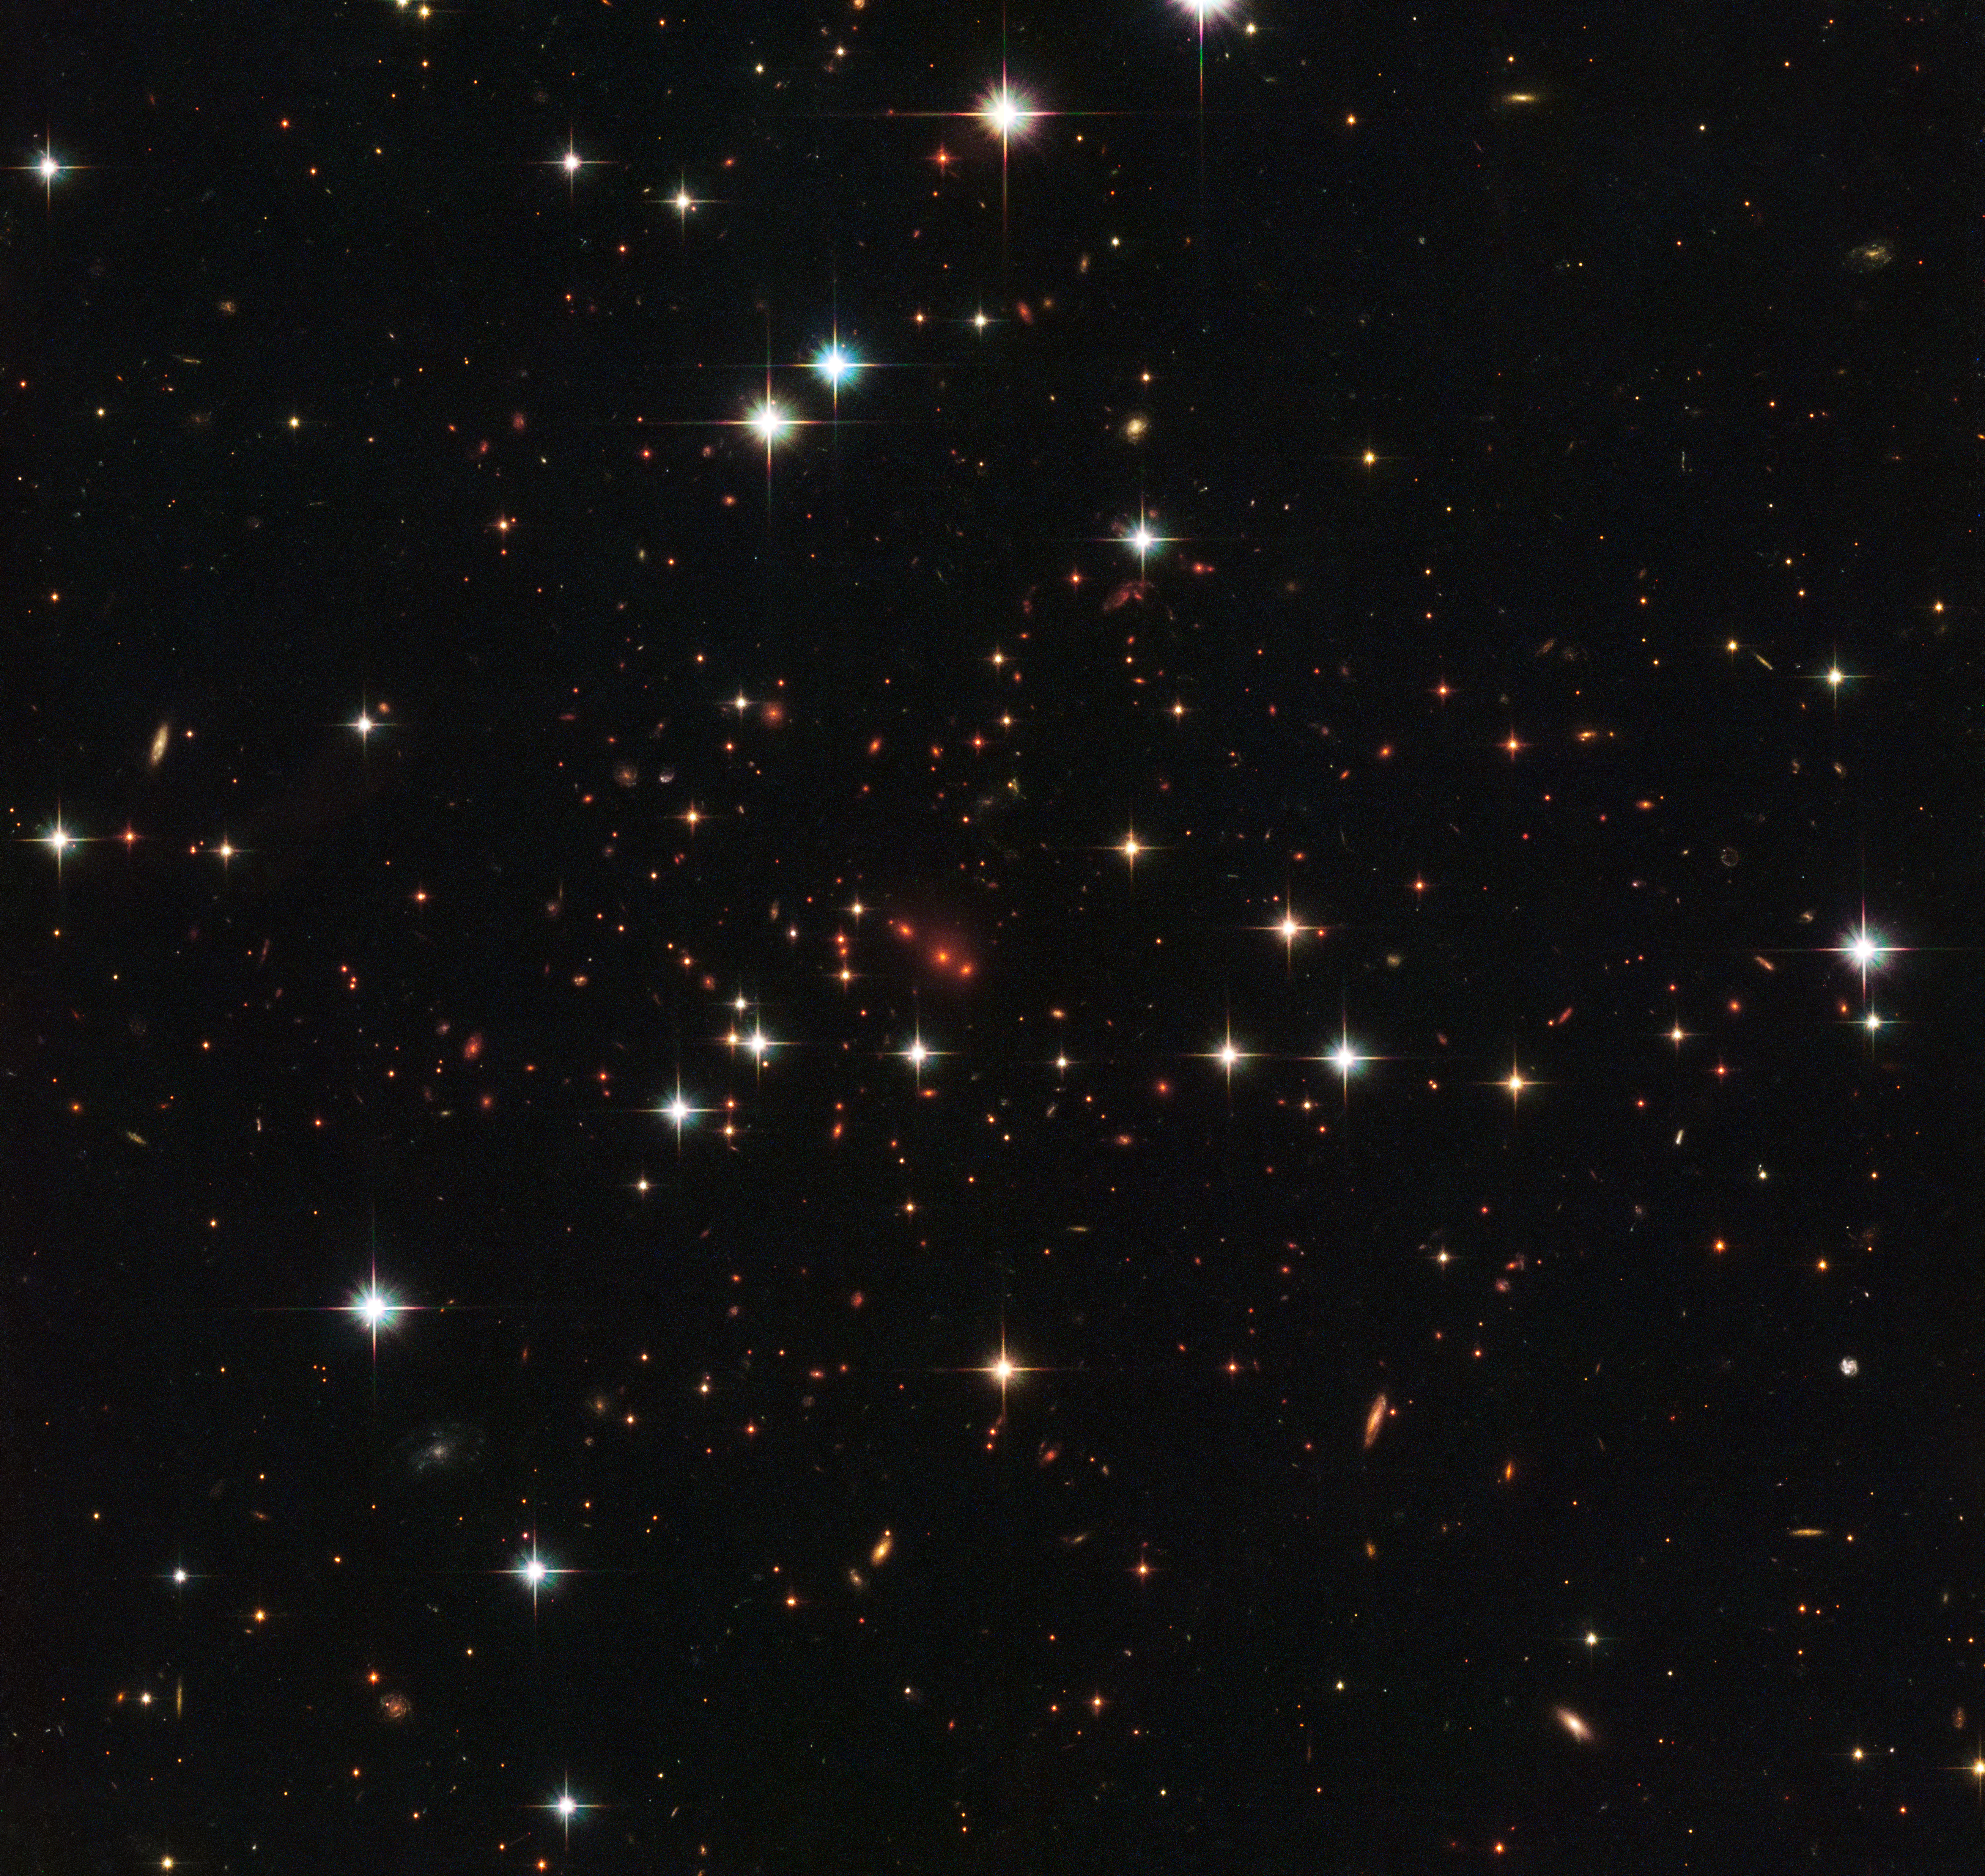

Approaching the Universe’s origins

This intriguing image from the NASA/ESA Hubble Space Telescope shows a massive galaxy cluster called PSZ2 G138.61-10.84, about six billion light-years away. Galaxies are not randomly distributed in space, but rather aggregated in groups, clusters and superclusters. The latter span over hundreds of millions of light-years and contain billions of galaxies.

Our own galaxy, for example, is part of the Local Group, which in turn is part of the giant Laniakea Supercluster. It was thanks to Hubble that we were able to study massive galactic superstructures such as the Hercules-Corona Borealis Great Wall; a giant galaxy cluster that contains billions of galaxies and extends 10 billion light-years across — making it the biggest known structure in the Universe.

This image was taken by Hubble’s Advanced Camera for Surveys and Wide-Field Camera 3 as part of an observing programme called RELICS (Reionization Lensing Cluster Survey). RELICS imaged 41 massive galaxy clusters with the aim of finding the brightest distant galaxies for the forthcoming NASA/ESA/CSA James Webb Space Telescope (JWST) to study.

Credit: ESA/Hubble & NASA, RELICS